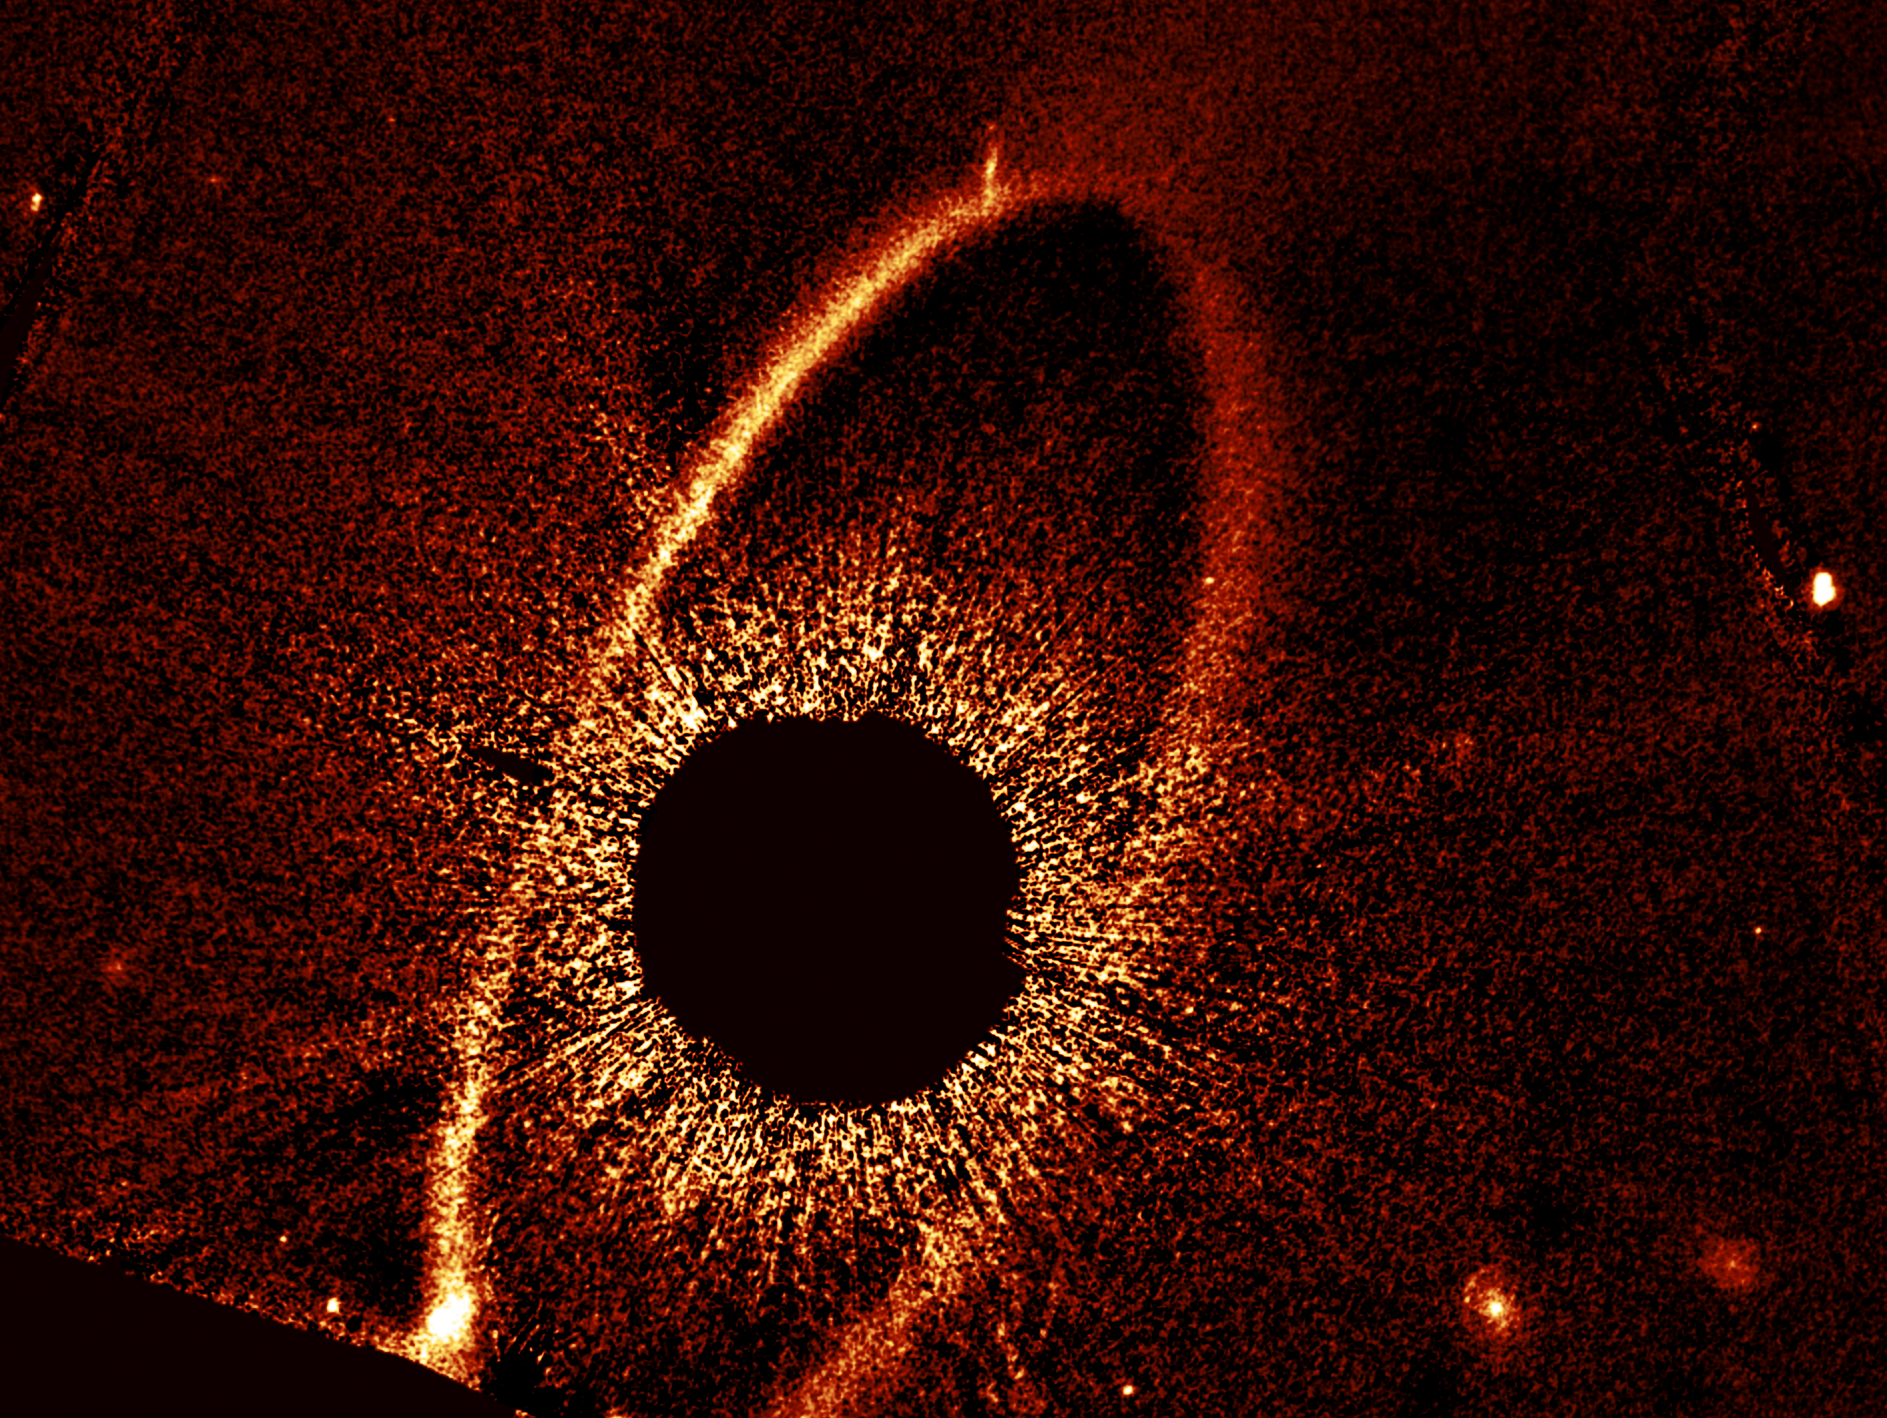

Fomalhaut cs1 and cs2 (clean image)

This composite NASA/ESA Hubble Space Telescope image shows the debris ring and dust clouds cs1 and cs2 around the star Fomalhaut. For comparison, dust cloud cs1, imaged in 2012, is pictured with dust cloud cs2, imaged in 2023. The dashed circles mark the location of these clouds. When dust cloud cs2 suddenly appeared, astronomers quickly noticed they had witnessed the violent collision of two massive objects. Previously thought to be a planet, cs1 is now classified as a similar debris cloud. In this image, Fomalhaut itself is masked out to allow the fainter features to be seen.

This image was created from Hubble data from proposal #17139 (P. Kalas).

Credit: NASA, ESA, P. Kalas (UC Berkeley), J. DePasquale (STScI)